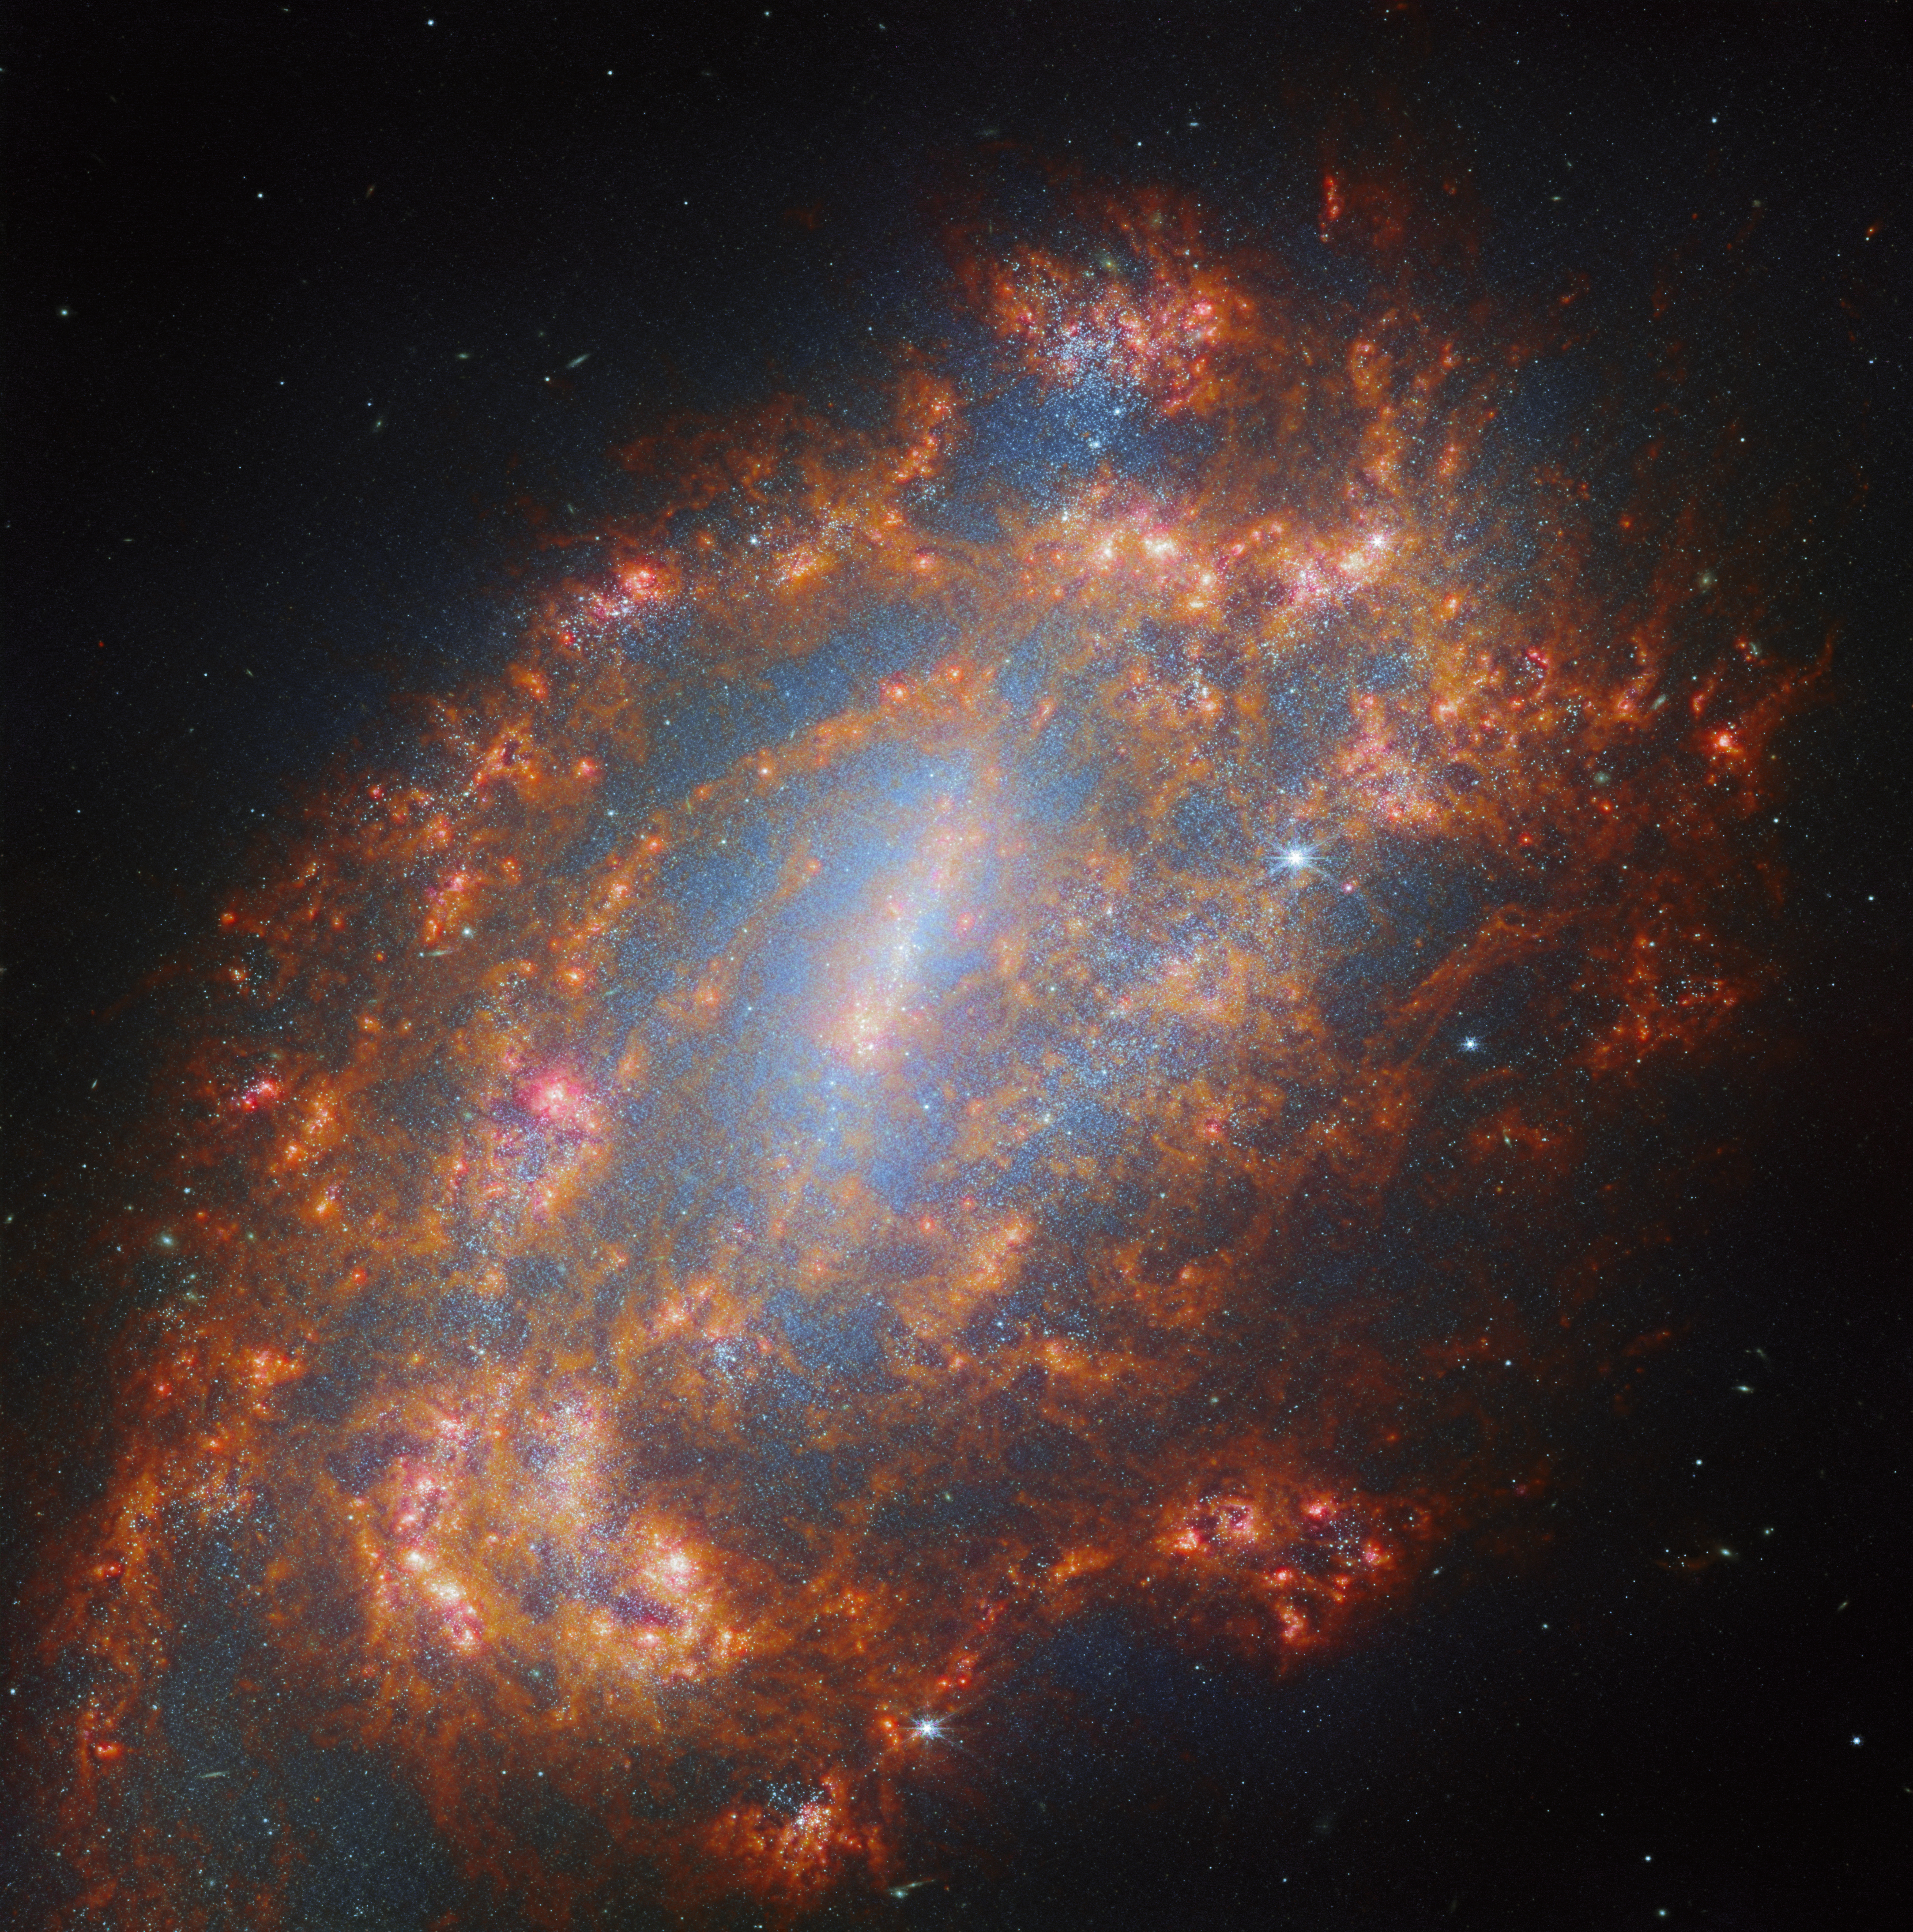

A galactic treasury

This image features the barred spiral galaxy galaxy NGC 1559 as seen by the NASA/ESA/CSA James Webb Space Telescope. The galaxy hosts a visible central region with a distinct open pattern in the loosely-wound spiral arms. NGC 1559 resides approximately 35 million light-years away in the little-observed southern constellation Reticulum (The Reticule).

The data featured in this portrait make use of two of Webb’s instruments: the Mid-InfraRed Instrument (MIRI) and Near-InfraRed Camera (NIRCam). Here MIRI captures the glow of interstellar dust grains, which trace out the interstellar medium, the fuel for future star formation. NIRCam shows the light from stars, even young stars hidden behind prodigious amounts of dust. NIRCam also captures emission from ionised nebulae around young stars.

The data were collected by the PHANGS team as part of an observing programme in which Webb will observe 55 galaxies that have also been mapped by the Atacama Large Millimeter/submillimeter Array (ALMA) radio telescope, the NASA/ESA Hubble Space Telescope and more. By combining Webb’s unprecedented view of the dust and stars with data from these other facilities, the team aims to obtain a new, highly detailed view of how stars are born, live, and die in galaxies across the Universe. This is also a Treasury programme, which means that the data will have no exclusive access period and so the scientific community (and others, including the general public) can access the data immediately. This has the advantage that more research can be done with the data more quickly.

NGC 1559 has massive spiral arms that abound with star formation, and it is receding from us at a speed of about 1300 kilometres per second. Although NGC 1559 appears to sit near one of our nearest neighbours in the sky — the Large Magellanic Cloud (LMC) - this is just a trick of perspective. In reality, NGC 1559 is physically nowhere near the LMC in space; in fact it truly is a loner, lacking the company of any nearby galaxies or membership of any galaxy cluster.

NGC 1559 may be alone in space, but with Webb we are admiring from far away.

Credit: ESA/Webb, NASA & CSA, A. Leroy, J. Lee and the PHANGS Team